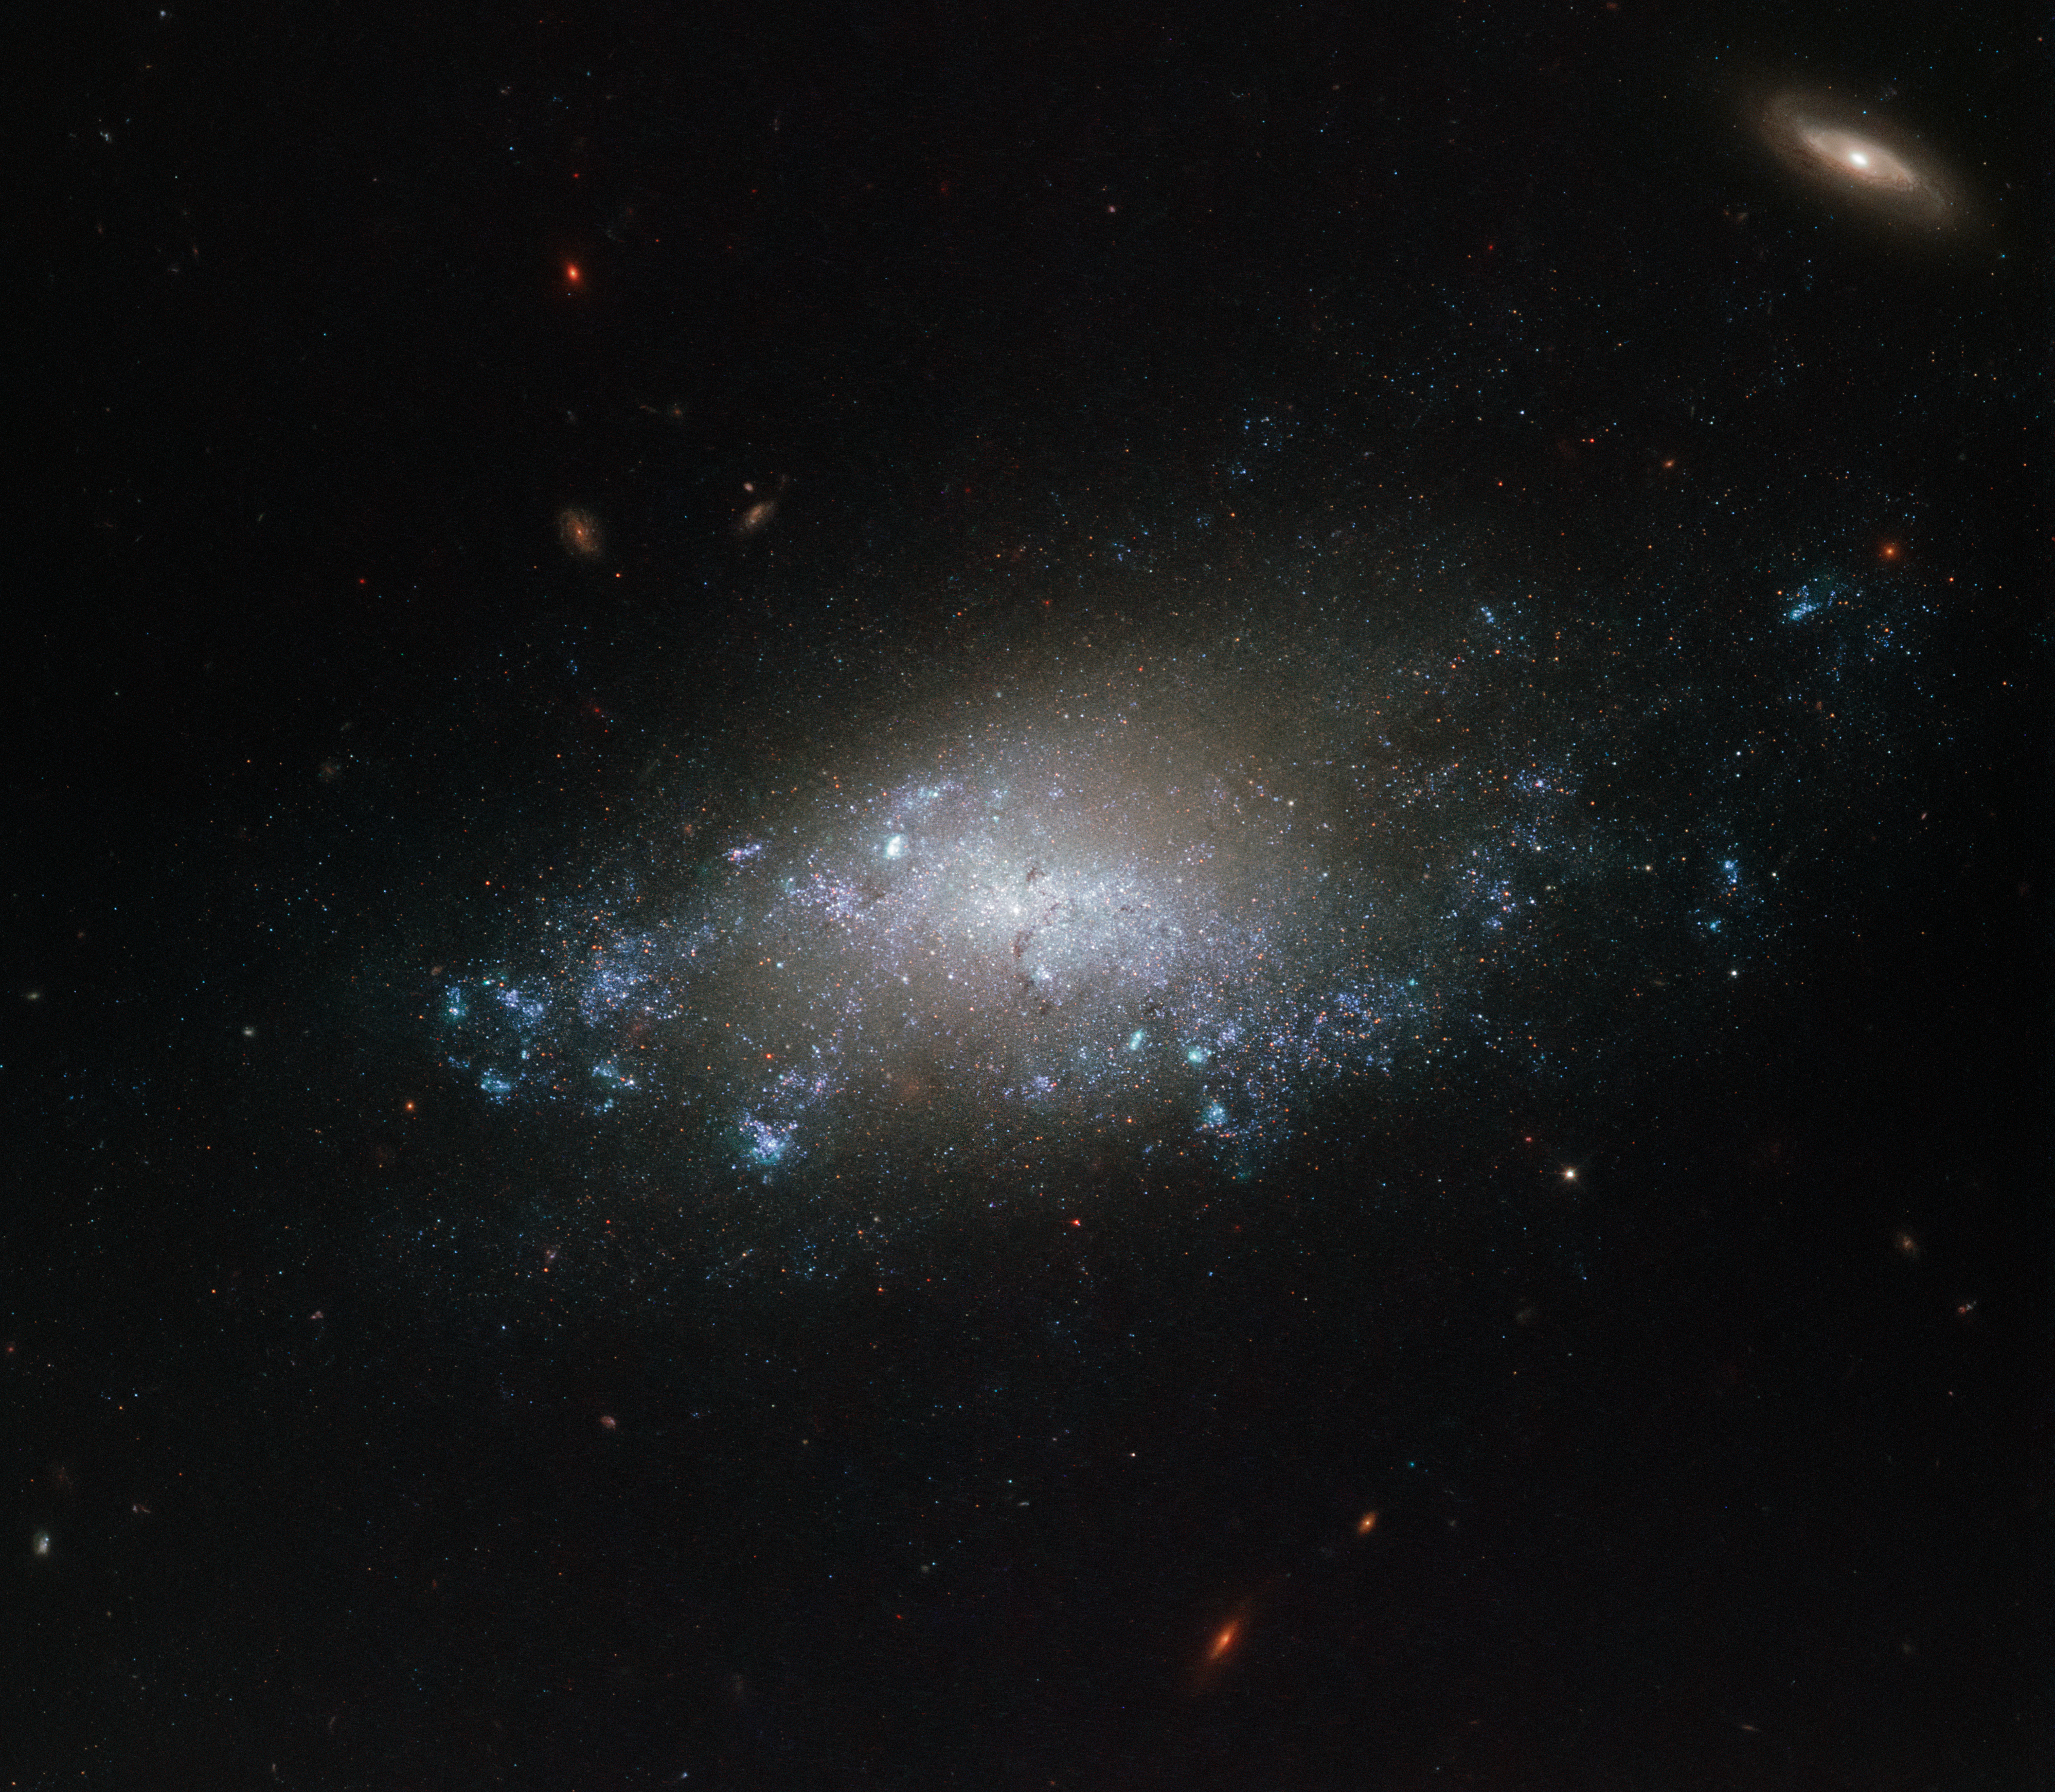

Hubble spies NGC 3274

This image of the spiral galaxy NGC 3274 comes courtesy of the NASA/ESA Hubble Space Telescope’s Wide Field Camera 3 (WFC3). Hubble’s WFC3 vision spreads from the ultraviolet light through to the near infrared , allowing astronomers to study a wide range of targets, from nearby star formation through to galaxies in the most remote regions of the cosmos.

This particular image combines observations gathered in five different filters, bringing together ultraviolet, visible, and infrared light to show off NGC 3274 in all its glory. As with all of the data Hubble sends back to Earth, it takes advantage of the telescope’s location in space above our planet’s distorting atmosphere. WFC3 returns clear, crisp, and detailed images time after time.

NGC 3274 is a relatively faint galaxy located over 20 million light-years away in the constellation of Leo (The Lion). The galaxy was discovered by Wilhelm Herschel in 1783. The galaxy PGC 213714 is also visible on the upper right of the frame, located much further away from Earth.

Credit: ESA/Hubble & NASA, D. Calzetti